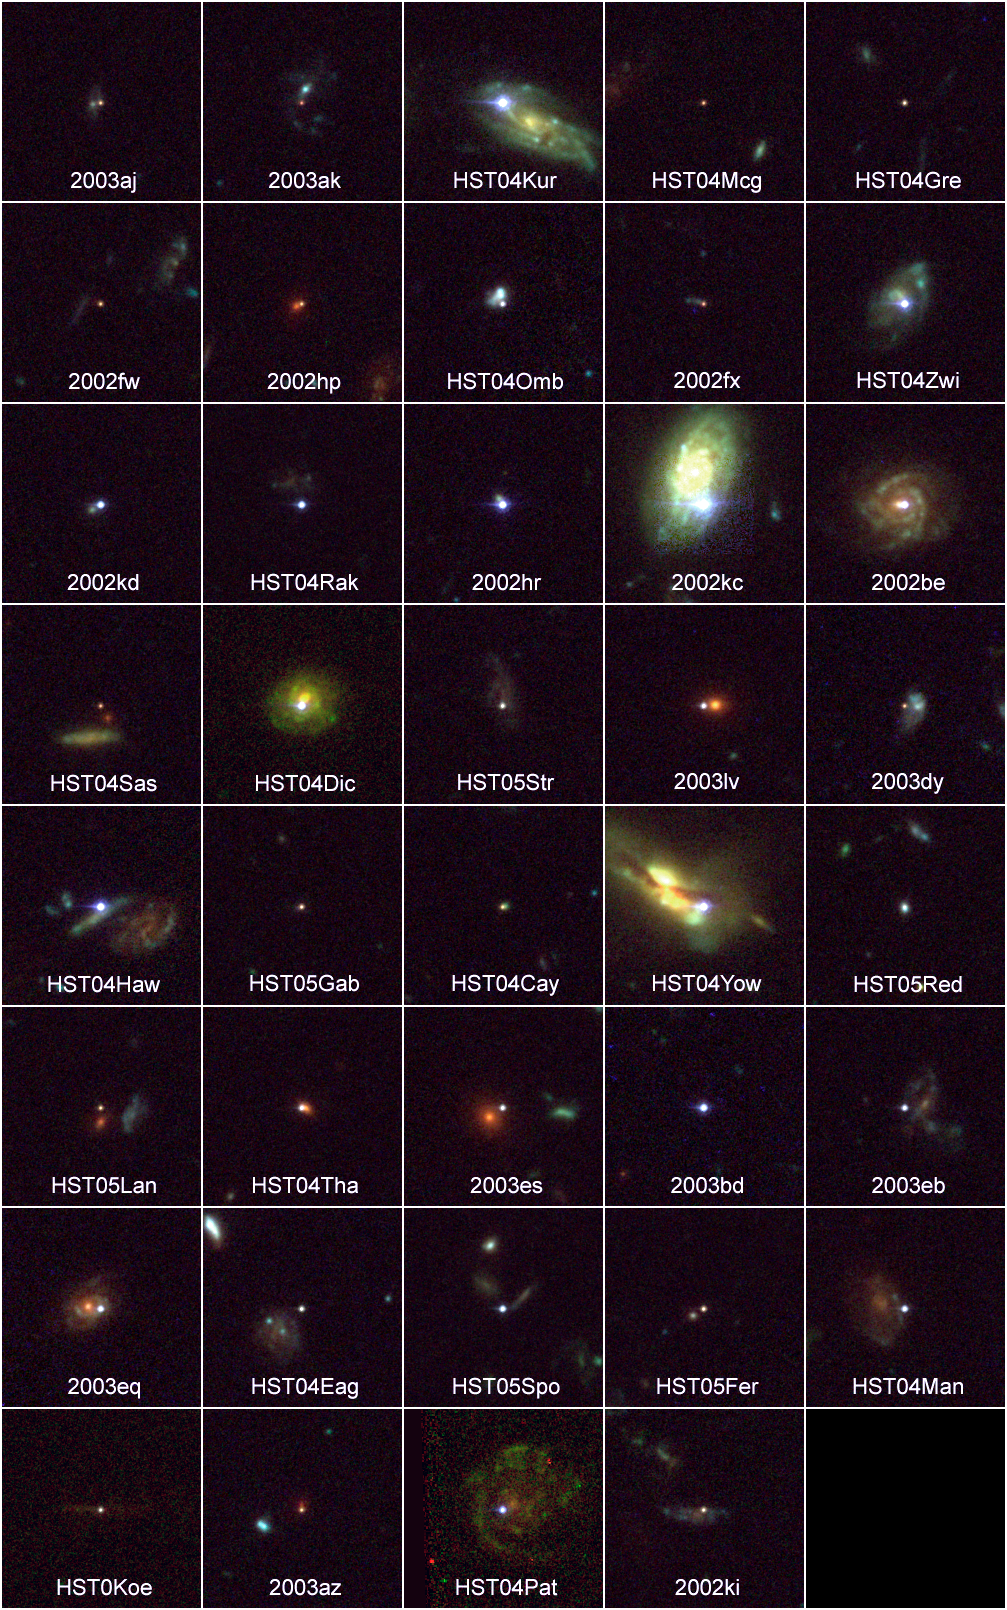

39 distant Supernovae

Supernovae are extremely luminous and cause a burst of radiation that often briefly outshines an entire galaxy, before fading from view over several weeks or months. During this short interval a supernova can radiate as much energy as the Sun is expected to emit over its entire life span.

Credit: NASA, ESA, and A. Riess (STScI)